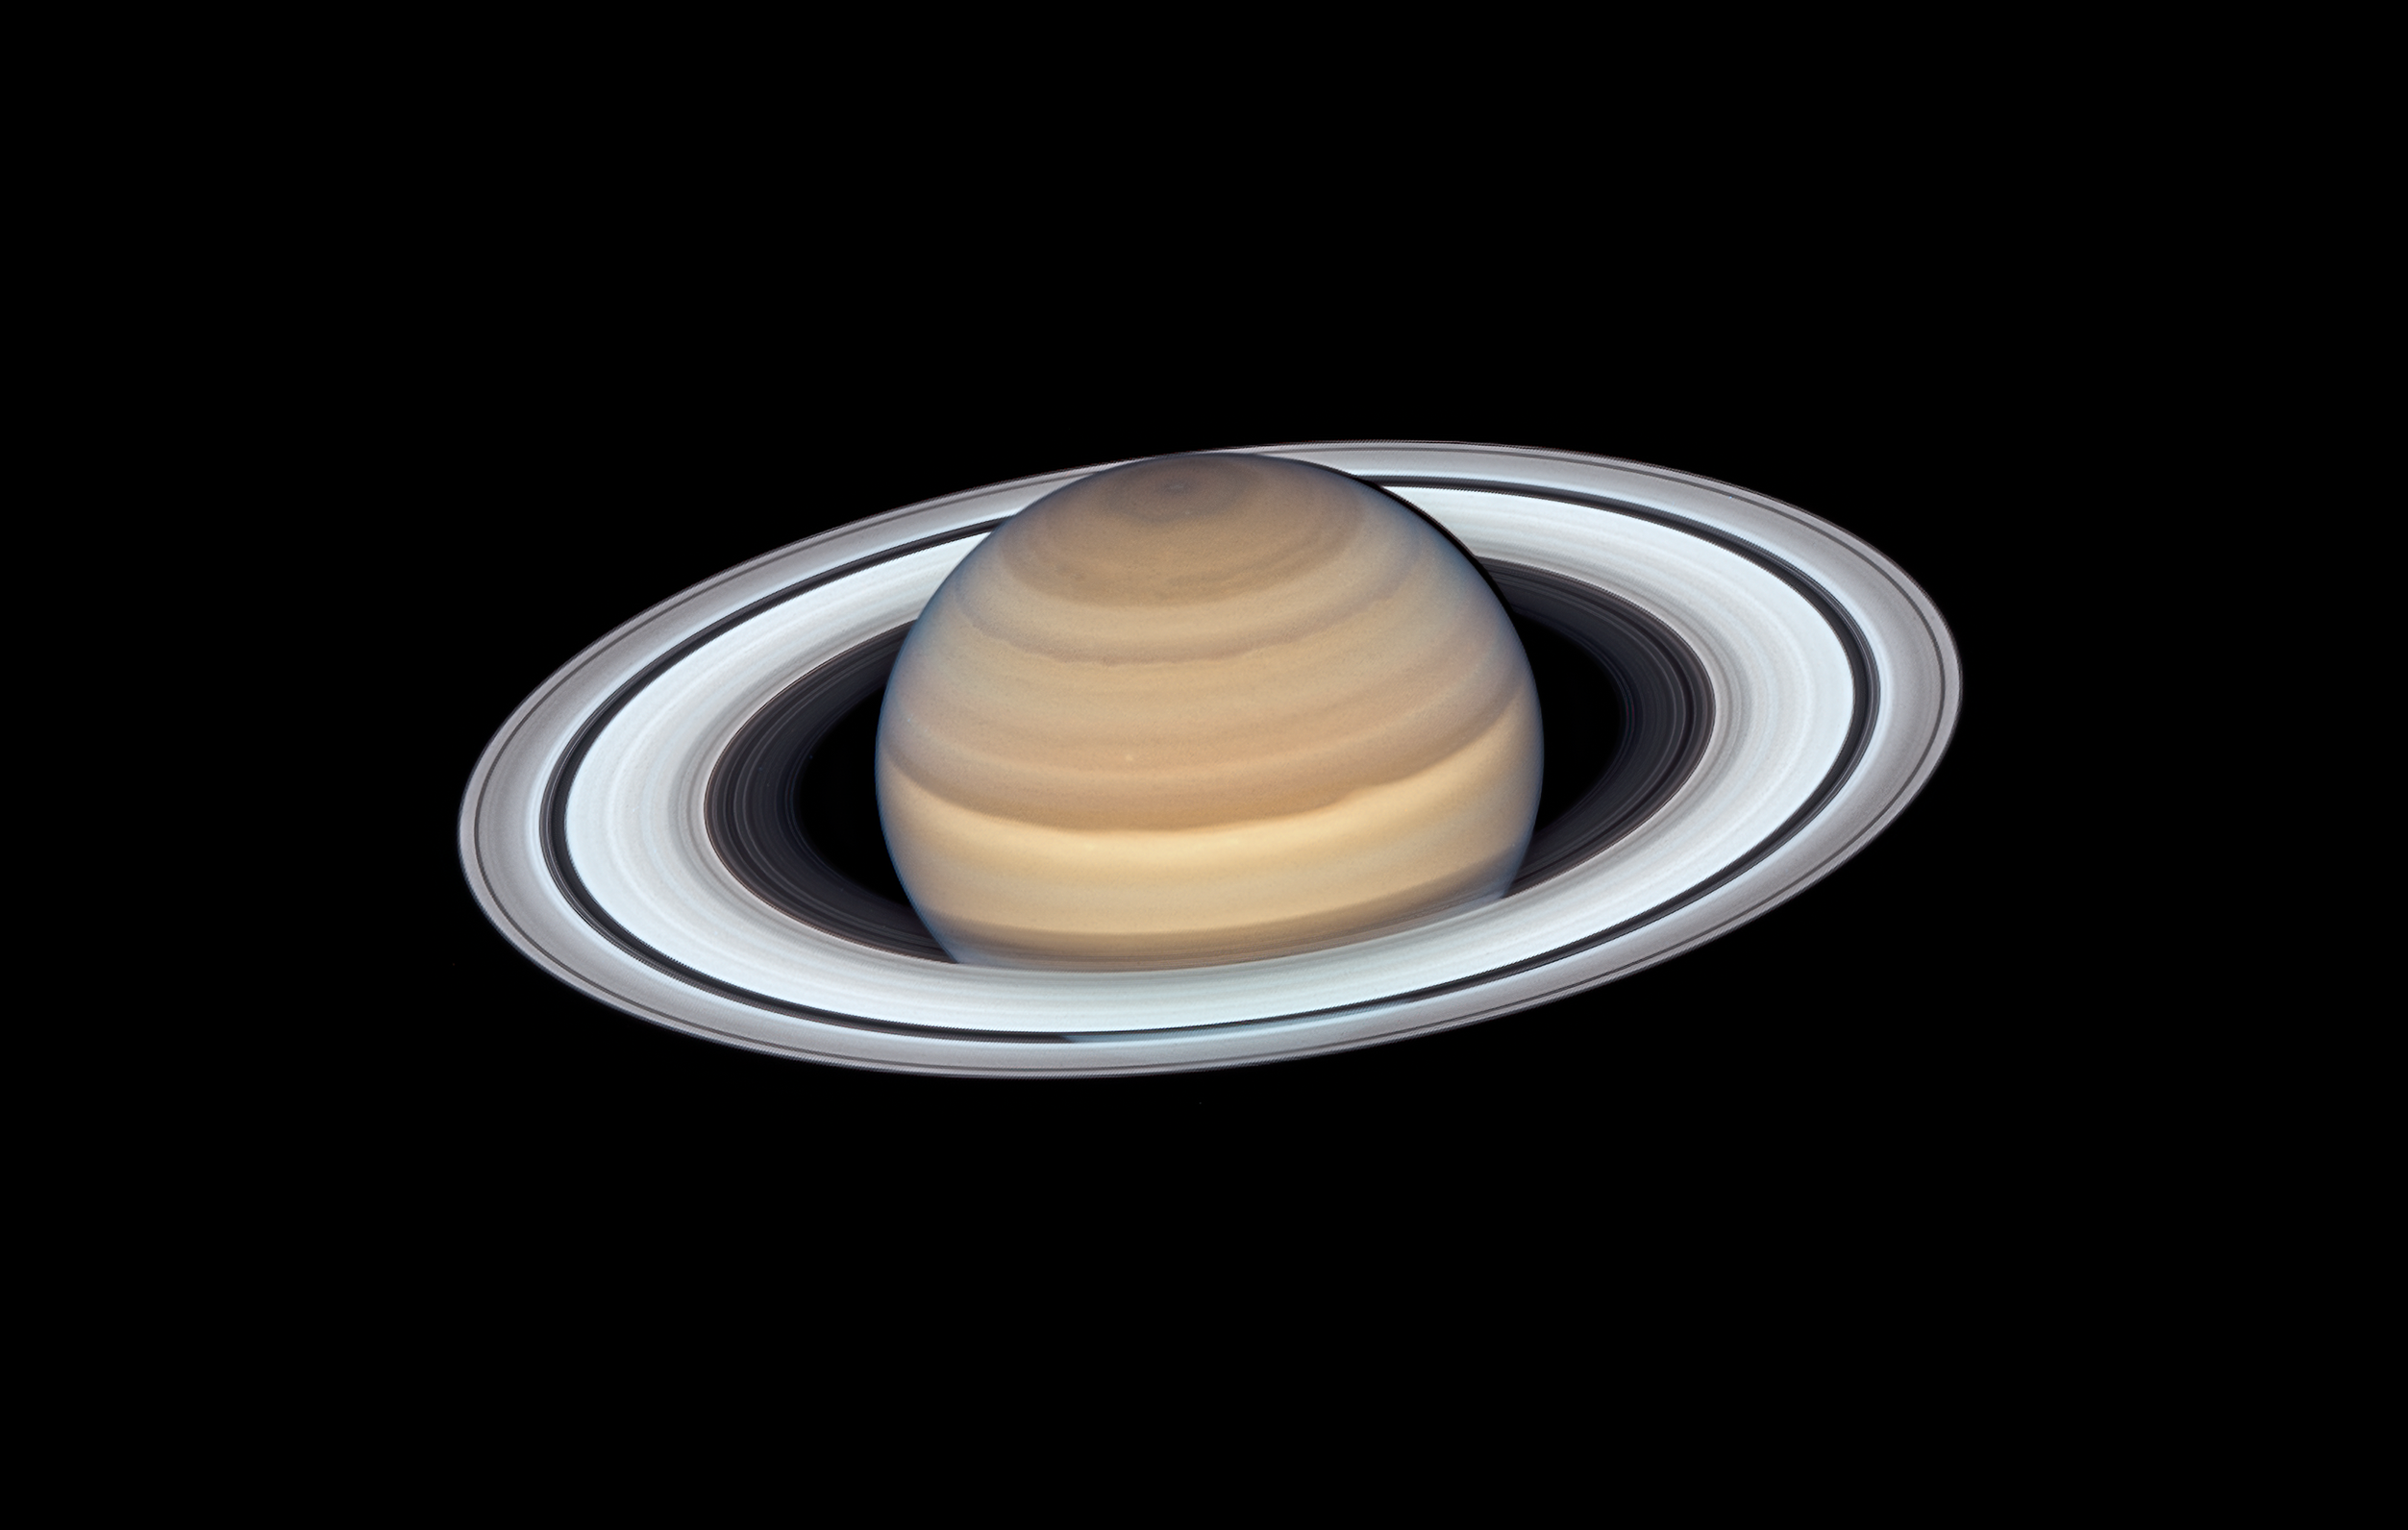

Latest Saturn Portrait

The NASA/ESA Hubble Space Telescope’s Wide Field Camera 3 observed Saturn on 20 June 2019 as the planet made its closest approach to Earth this year, at approximately 1.36 billion kilometres away.

Credit: NASA, ESA, A. Simon (Goddard Space Flight Center), and M.H. Wong (University of California, Berkeley)